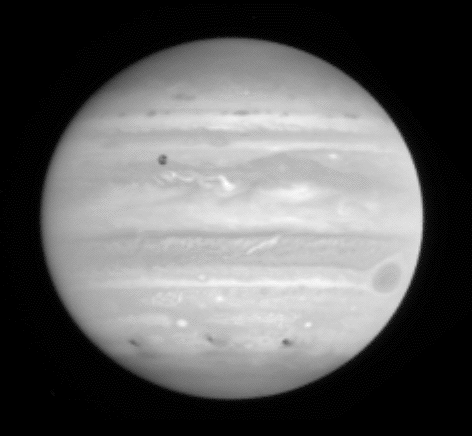

Jupiter Comet Impact

This image shows the aftermath of comet P/Shoemaker-Levy 9's impact with Jupiter. The impact sites of fragments C, A and E are visible on the southern hemisphere, from left to right and this image was taken about 12, 23, and 4 hours after each collision. Jupiter's satellite 10 is seen crossing above the center of the disk, and the famous Great Red Spot is near the eastern limb.

Credit: NASA & ESA